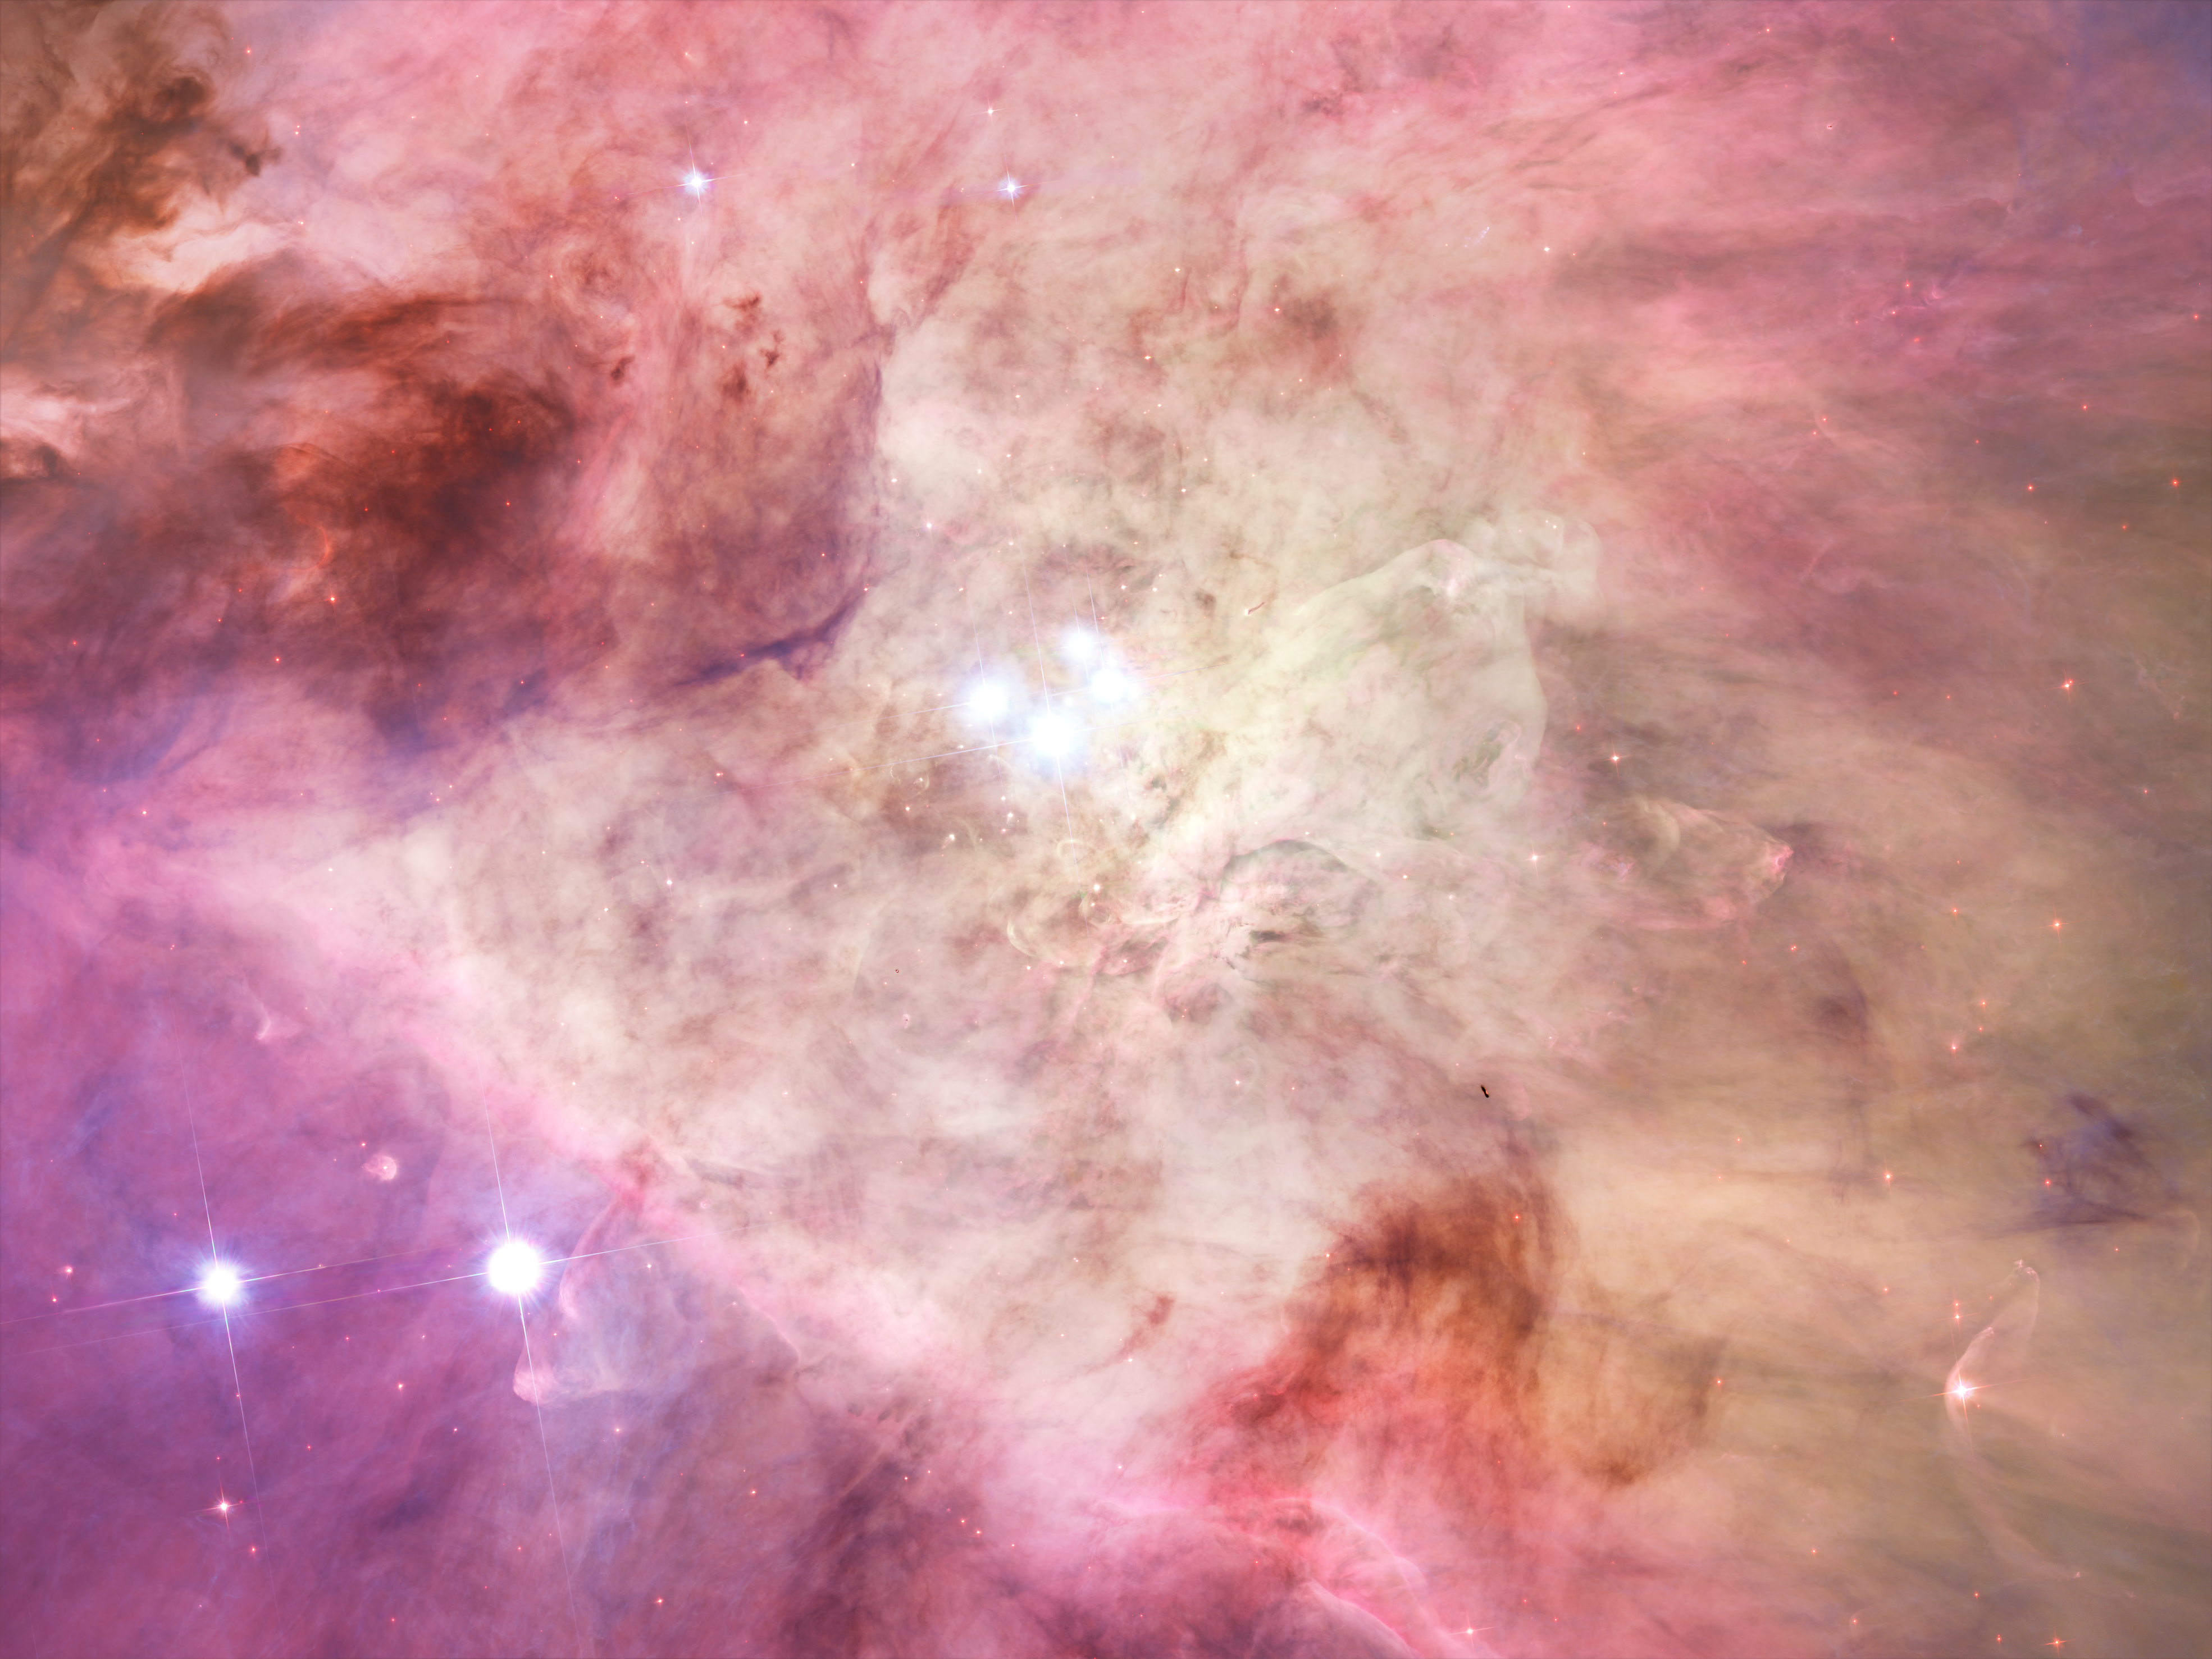

The Orion Nebula's biggest stars

Packed into the centre of this region are bright lights of the Trapezium stars, the four heftiest stars in the Orion Nebula. Ultraviolet light unleashed by these stars is carving a cavity in the nebula and disrupting the growth of hundreds of smaller stars. The dark speck near the bottom, right of the image is a silhouette of an edge-on disk encircling a young star. Another whitish-looking disk is visible near the bottom, left, just above the two bright stars. This disk is encased in a bubble of gas and dust.

Credit: NASA, ESA, M. Robberto ( Space Telescope Science Institute/ESA) and the Hubble Space Telescope Orion Treasury Project Team